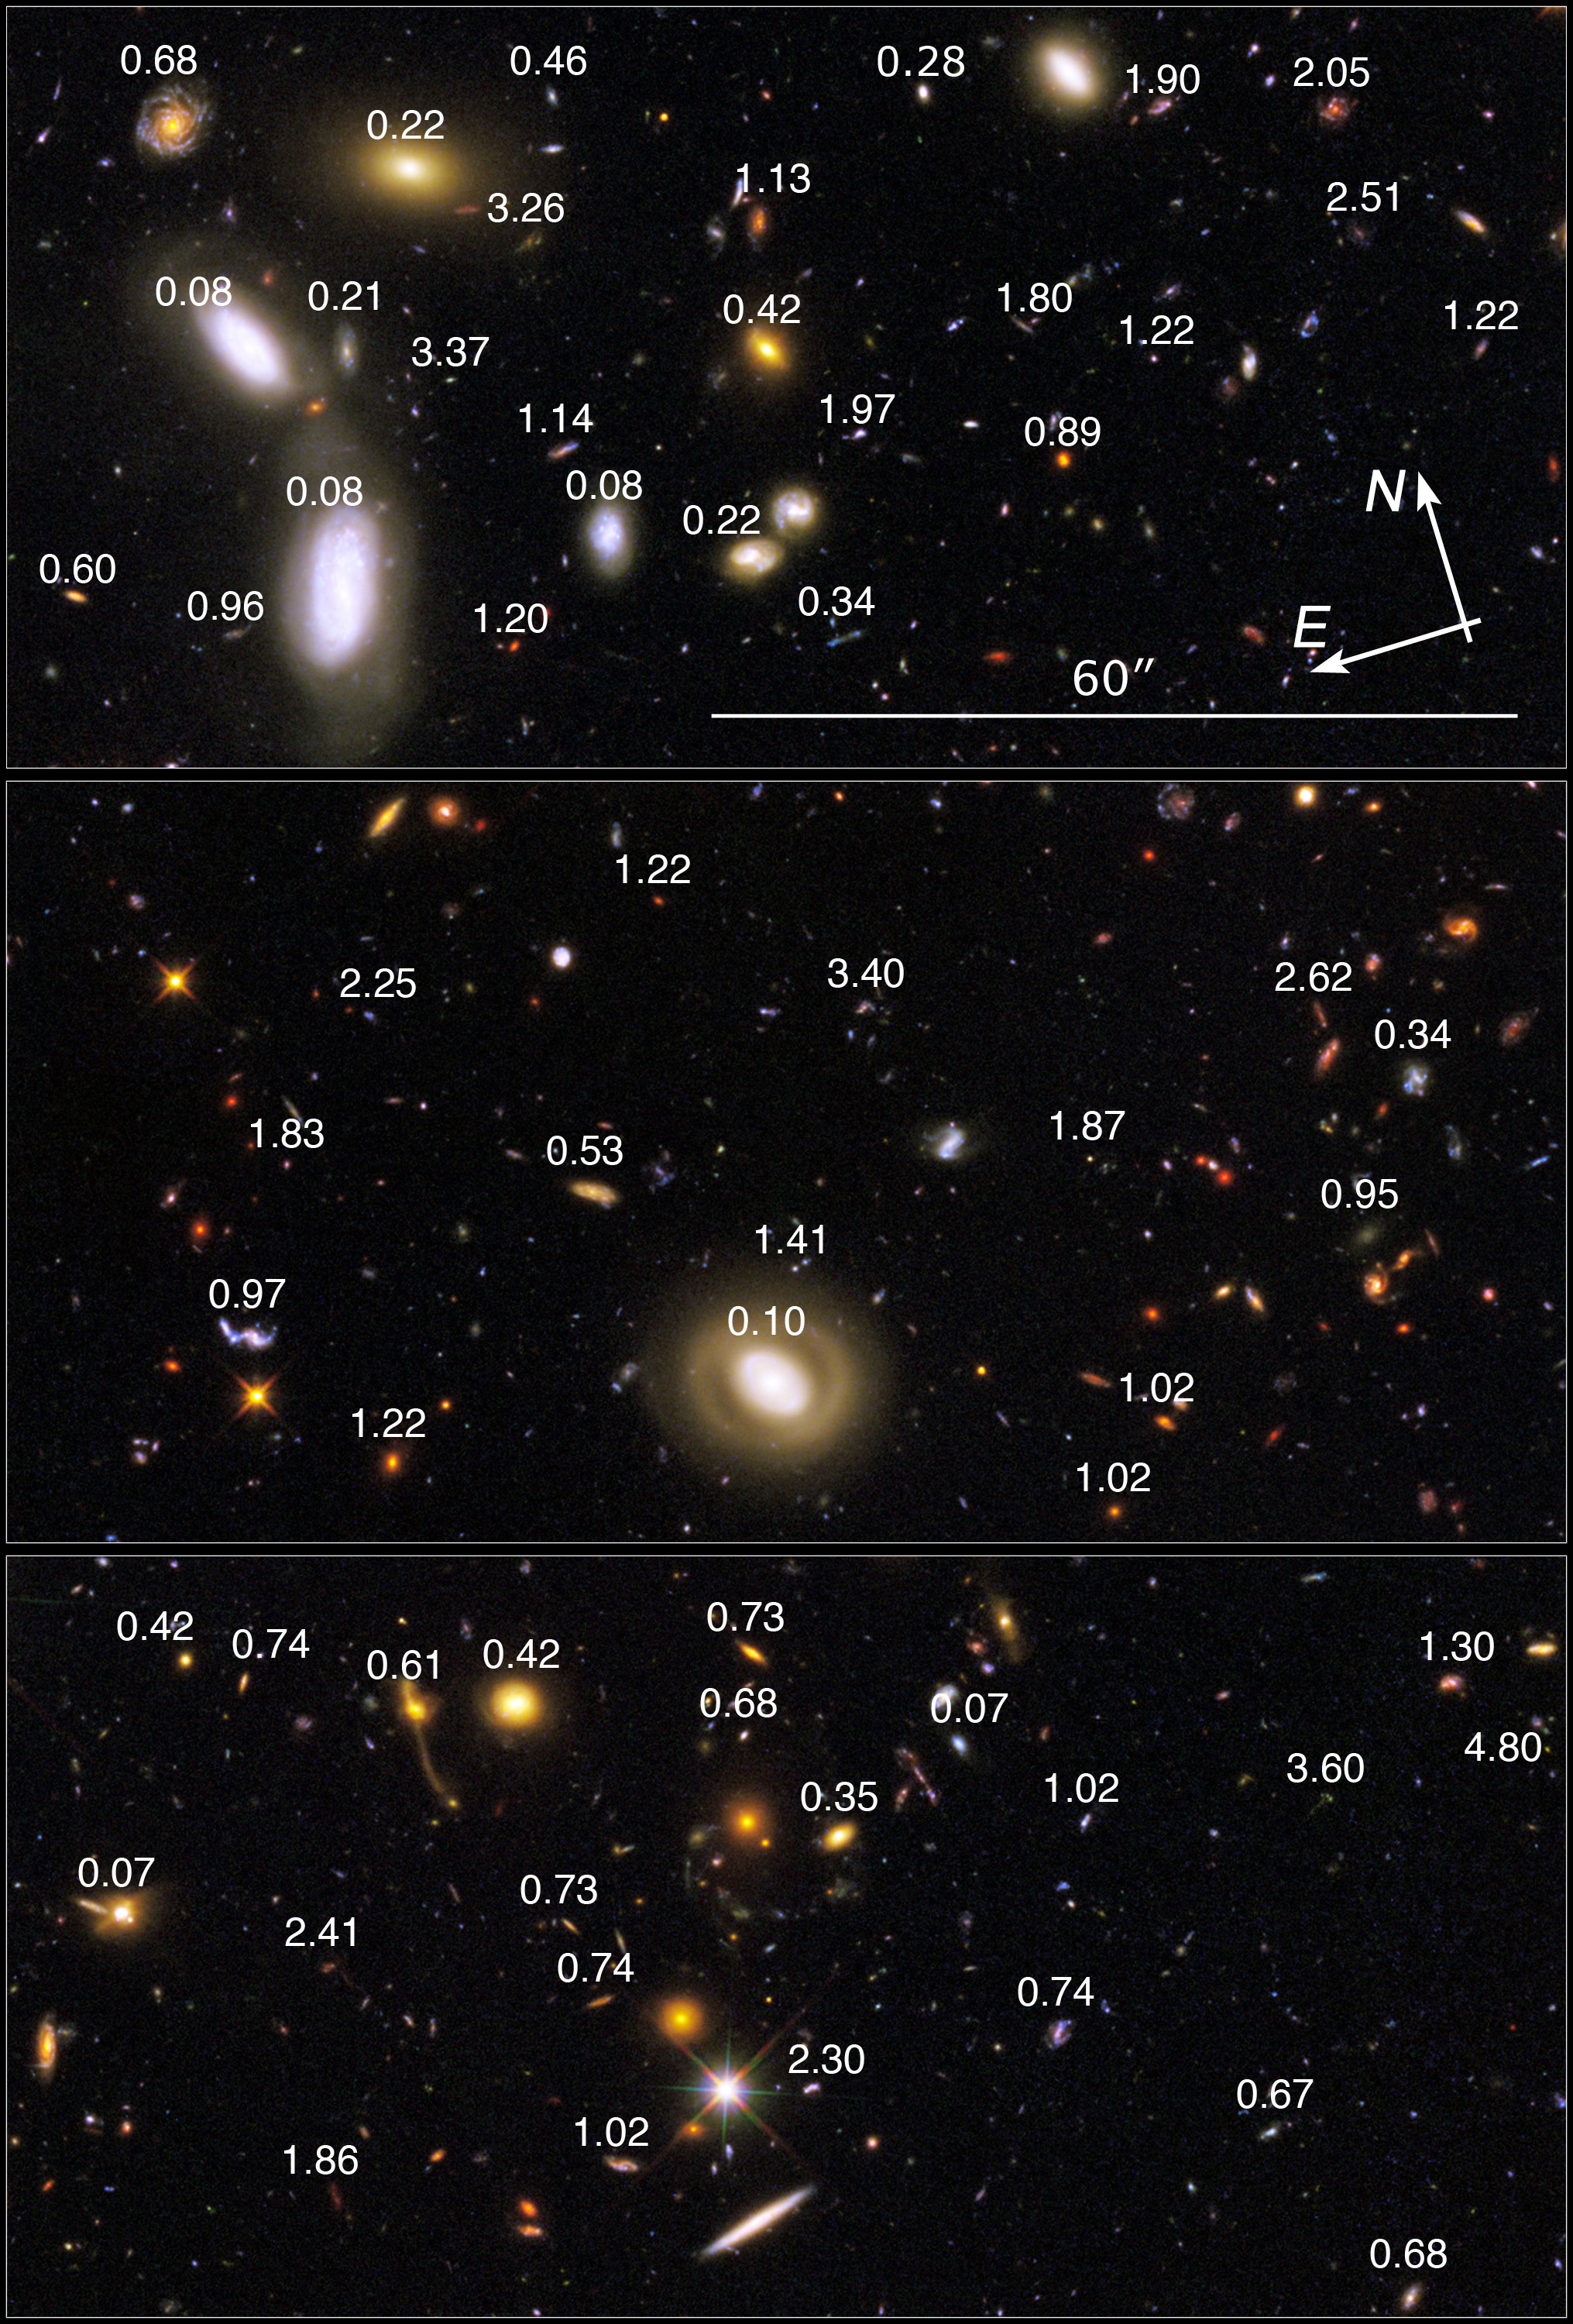

GOODS-S/ERS Details with Redshifts

This view covers a portion of the southern field of a large galaxy census called the Great Observatories Origins Deep Survey (GOODS), a deep-sky study by several observatories to trace the evolution of galaxies.

Credit: NASA, ESA, R. Windhorst (Arizona State University), P. McCarthy (Carnegie Institution of Washington), R. O'Connell (University of Virginia) and the WFC3 Science Oversight Committee